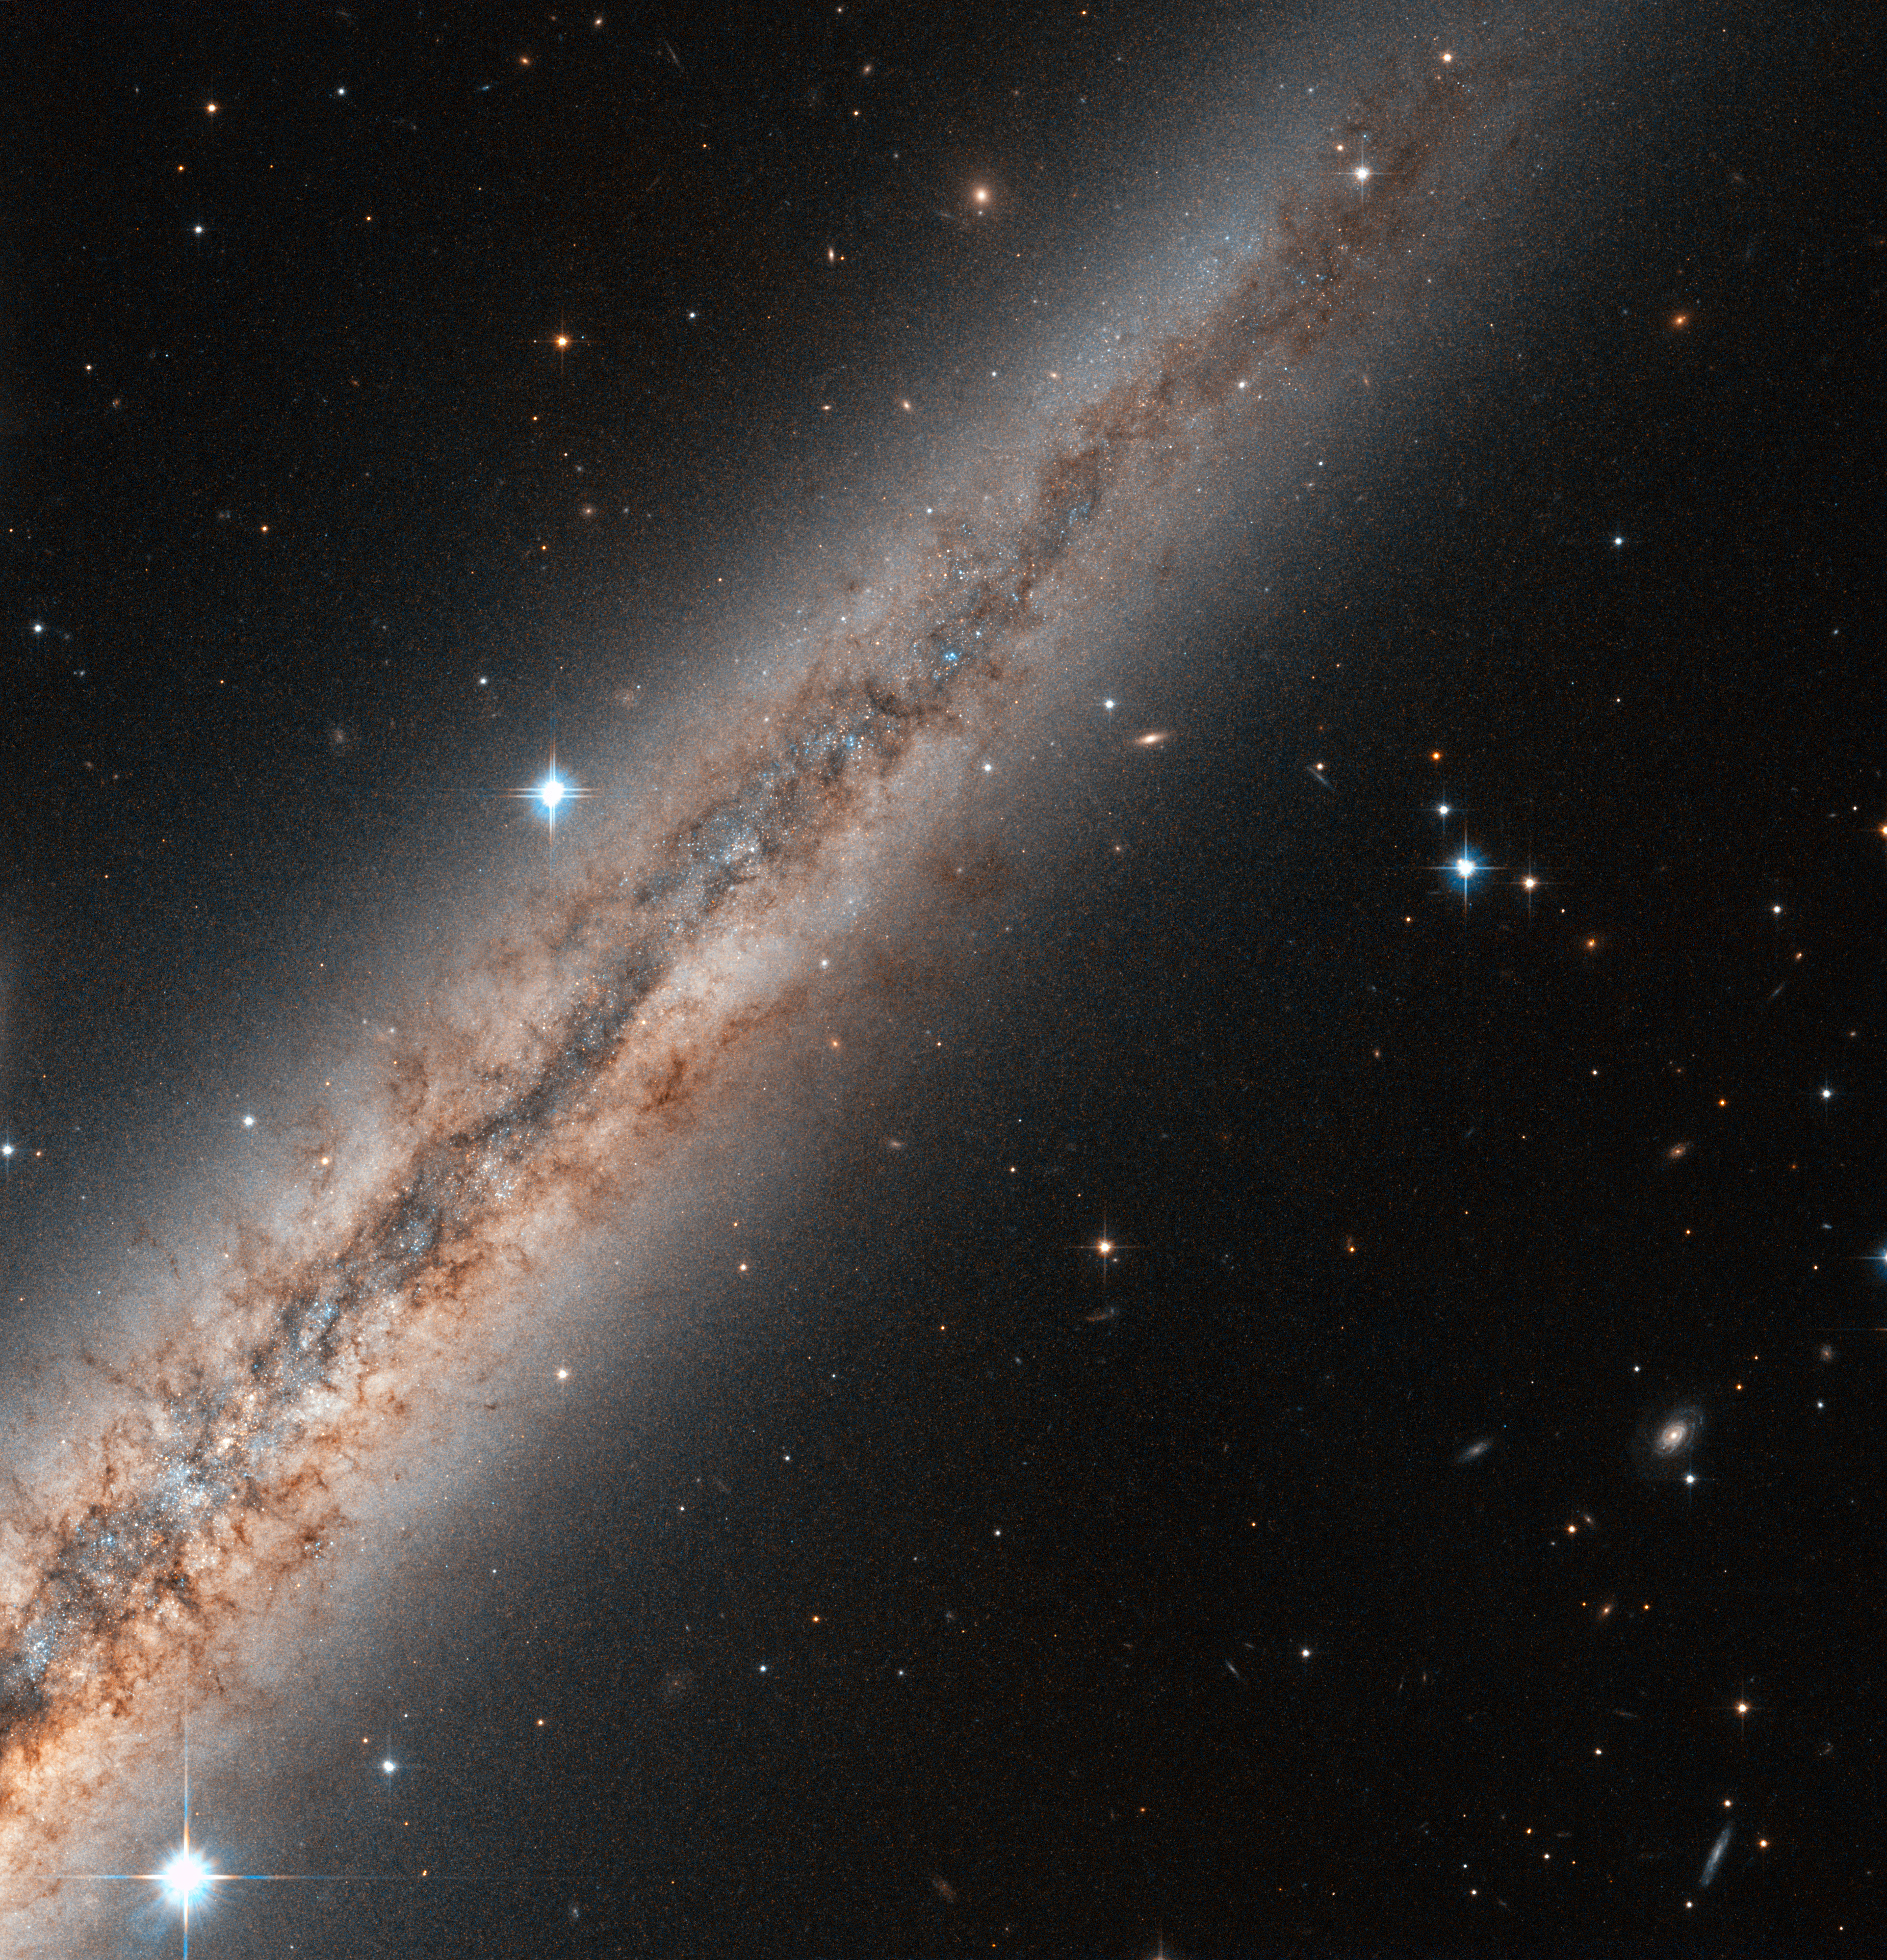

Edge-on beauty

Visible in the constellation of Andromeda, NGC 891 is located approximately 30 million light-years away from Earth. The NASA/ESA Hubble Space Telescope turned its powerful wide field Advanced Camera for Surveys towards this spiral galaxy and took this close-up of its northern half. The galaxy's central bulge is just out of the image on the bottom left.

The galaxy, spanning some 100 000 light-years, is seen exactly edge-on, and reveals its thick plane of dust and interstellar gas. While initially thought to look like our own Milky Way if seen from the side, more detailed surveys revealed the existence of filaments of dust and gas escaping the plane of the galaxy into the halo over hundreds of light-years. They can be clearly seen here against the bright background of the galaxy halo, expanding into space from the disc of the galaxy.

Astronomers believe these filaments to be the result of the ejection of material due to supernovae or intense stellar formation activity. By lighting up when they are born, or exploding when they die, stars cause powerful winds that can blow dust and gas over hundreds of light-years in space.

A few foreground stars from the Milky Way shine brightly in the image, while distant elliptical galaxies can be seen in the lower right of the image.

NGC 891 is part of a small group of galaxies bound together by gravity.

A version of this image was entered into the Hubble’s Hidden Treasures Image Processing Competition by contestant Nick Rose. Hidden Treasures is an initiative to invite astronomy enthusiasts to search the Hubble archive for stunning images that have never been seen by the general public.

Credit: ESA/Hubble & NASA Acknowledgement: Nick Rose